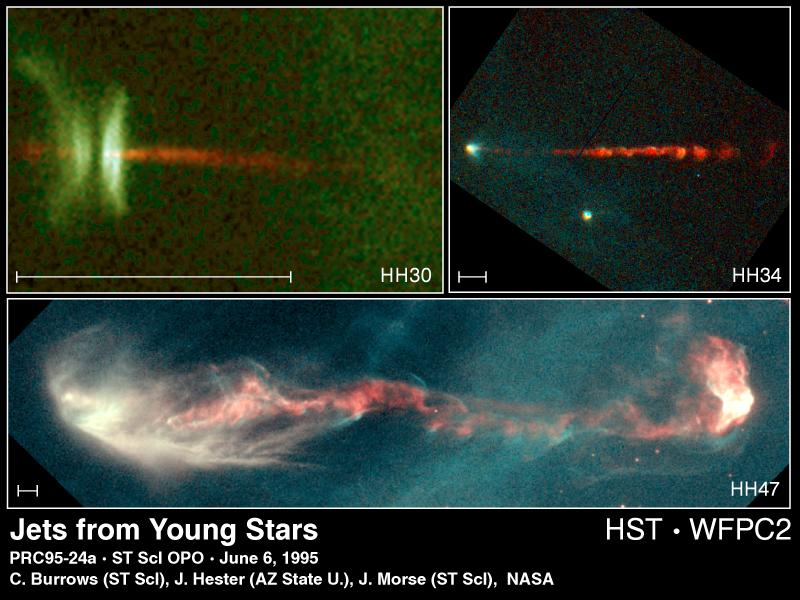

Jets from Young Stars

These Hubble Space Telescope views of gaseous jets from three newly forming stars show a new level of detail in the star formation process, and are helping to solve decade-old questions about the secrets of star birth.

Upper left image

This view of a protostellar object called HH-30 reveals an edge-on disk of dust encircling a newly forming star. Light from the forming star illuminates the top and bottom surfaces of the disk, making them visible, while the star itself is hidden behind the densest parts of the disk.

Upper right image

This view of a different and more distant jet in object HH-34 shows a remarkable beaded structure. Once thought to be a hydrodynamic effect (similar to shock diamonds in a jet aircraft exhaust), this structure is actually produced by a machine-gun-like blast of 'bullets' of dense gas ejected from the star at speeds of one-half million miles per hour (about 805 thousand kilometres per hour).

Bottom image

This view of a three trillion mile-long jet called HH-47 reveals a very complicated jet pattern that indicates the star (hidden inside a dust cloud near the left edge of the image) might be wobbling, possibly caused by the gravitational pull of a companion star.

Credit: C. Burrows (STScI & ESA), J. Hester (Arizona State University), J. Morse/STScI and NASA